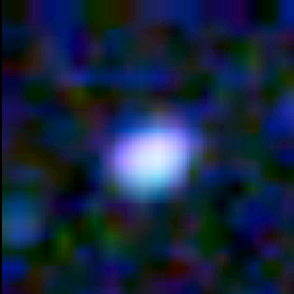

Galaxy building blocks

This is one Proto Galaxy out of a series of 18, taken by the Wide Field Planetary Camera 2.

Credit: Rogier Windhorst and Sam Pascarelle (Arizona State University) and NASA/ESA